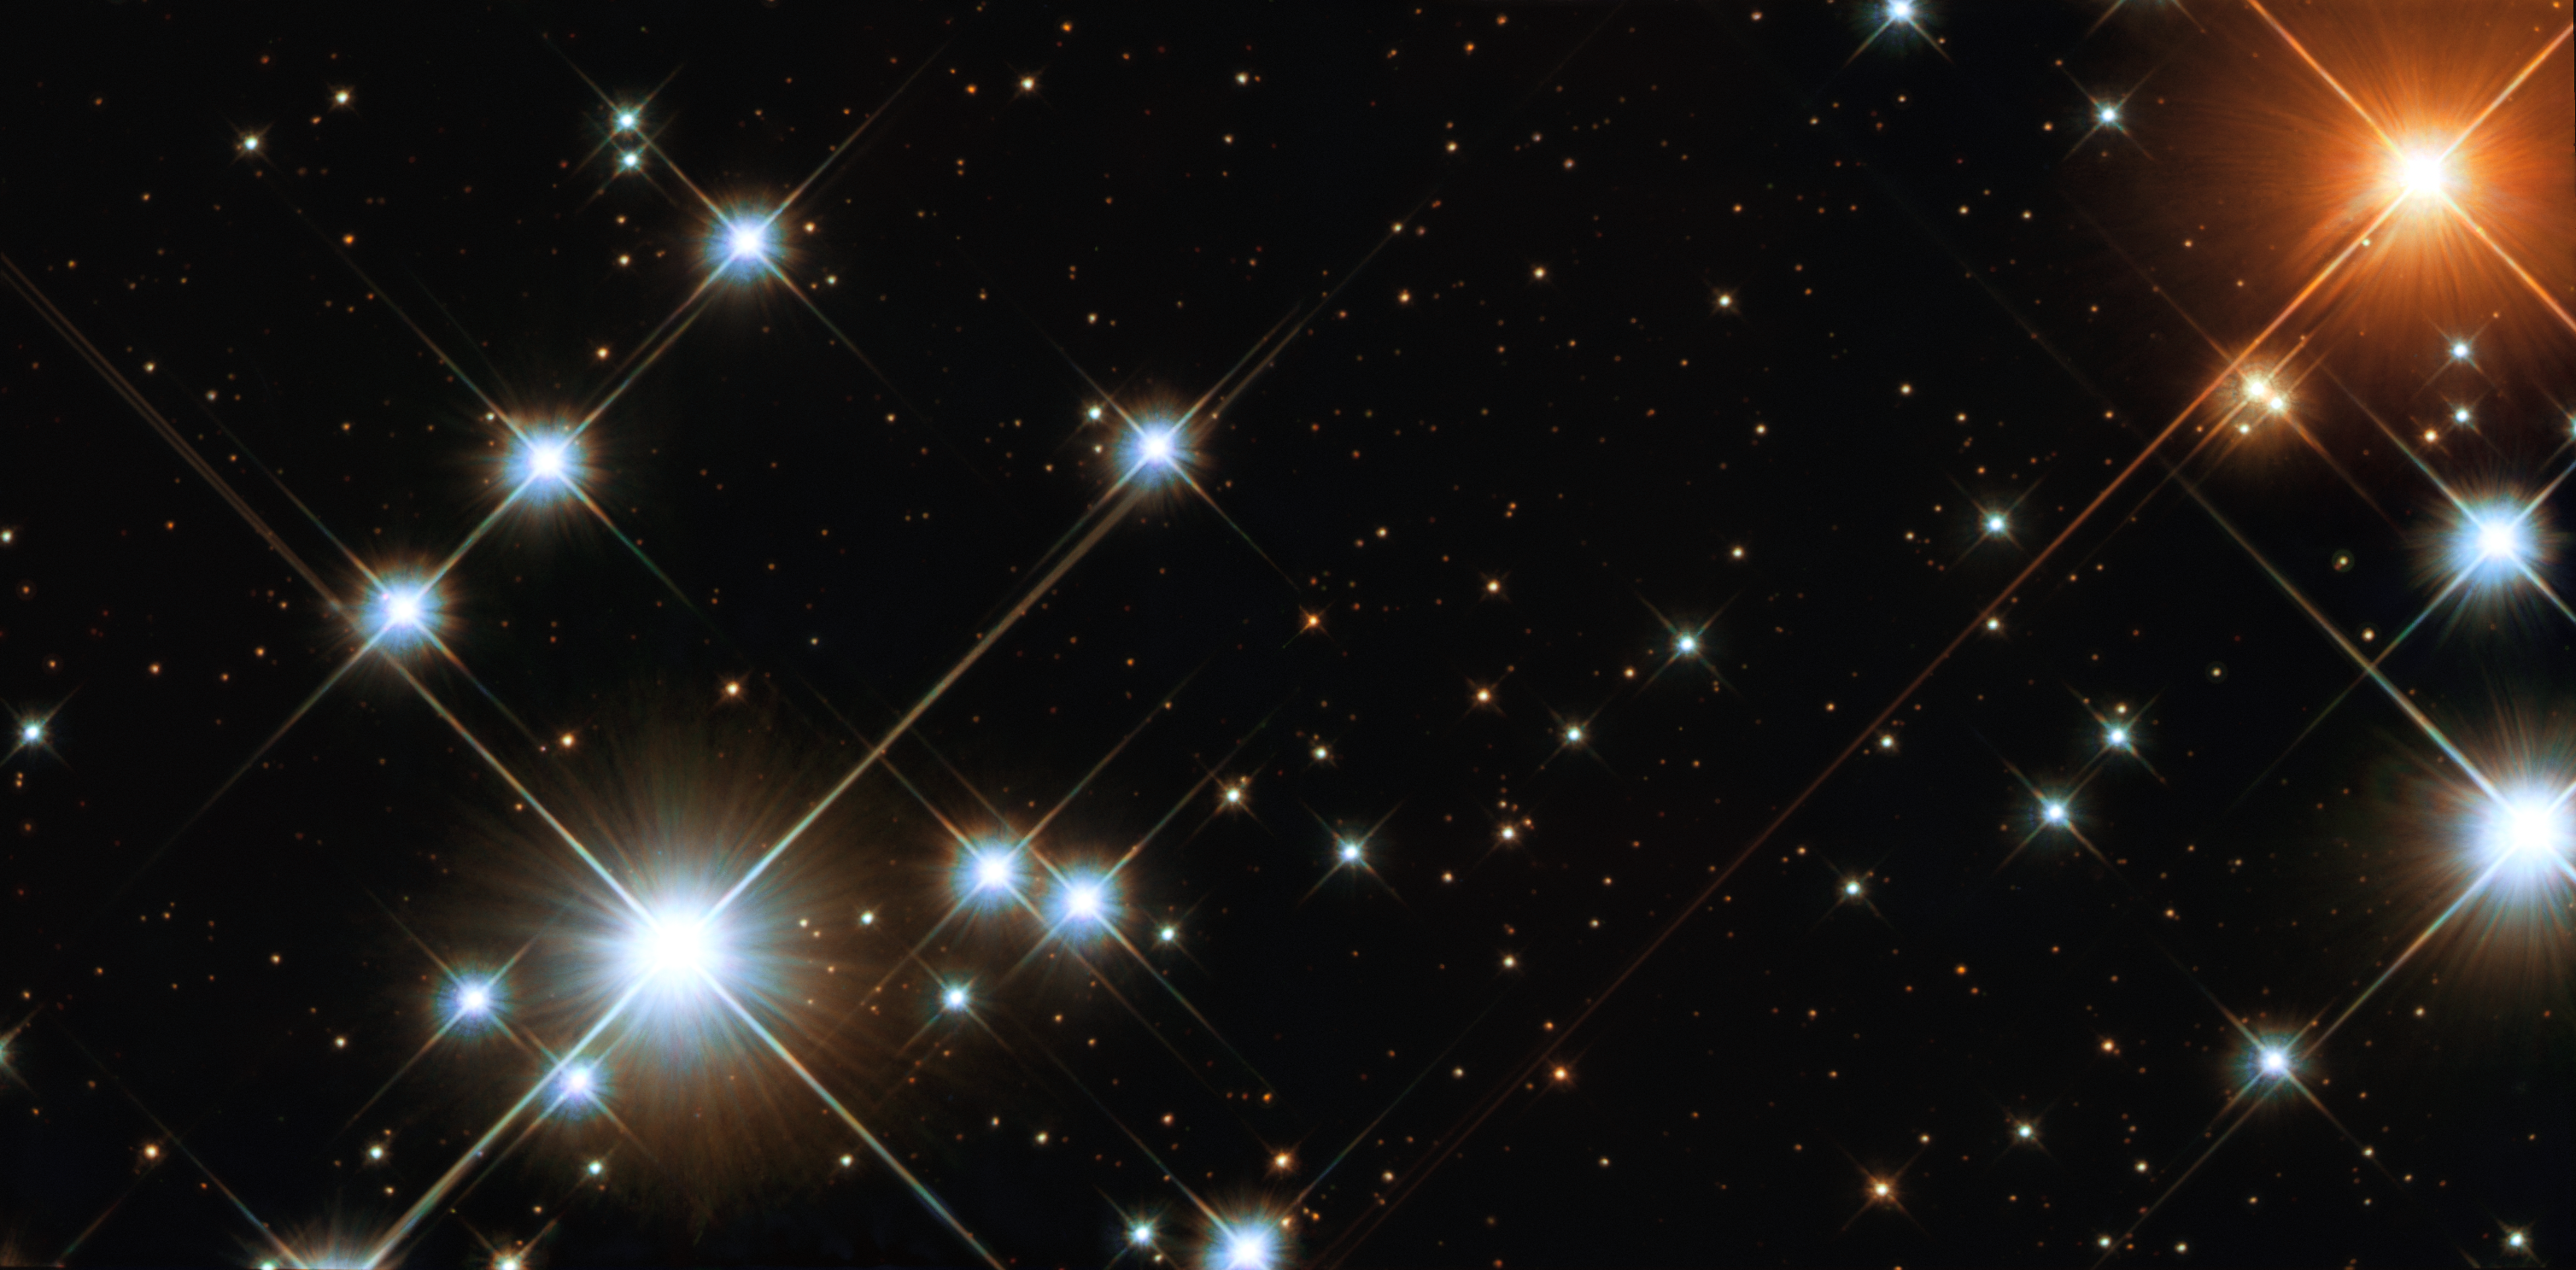

A Hubble gem: the Jewel Box

This image is a "close-up' view from the NASA/ESA Hubble Space Telescope of NGC 4755, or the Jewel Box cluster. Several very bright, pale blue supergiant stars, a solitary ruby-red supergiant and a variety of other brilliantly coloured stars are visible in the image, as well as many much fainter ones, often with intriguing colours. The huge variety in brightness exists because the brighter stars are 15 to 20 times the mass of the Sun, while the dimmest stars are less than half the mass of the Sun. This is the first image of an open galactic cluster with imaging extending from the far ultraviolet to the near-infrared.

Credit: NASA/ESA and Jesús Maíz Apellániz (Instituto de Astrofísica de Andalucía, Spain)